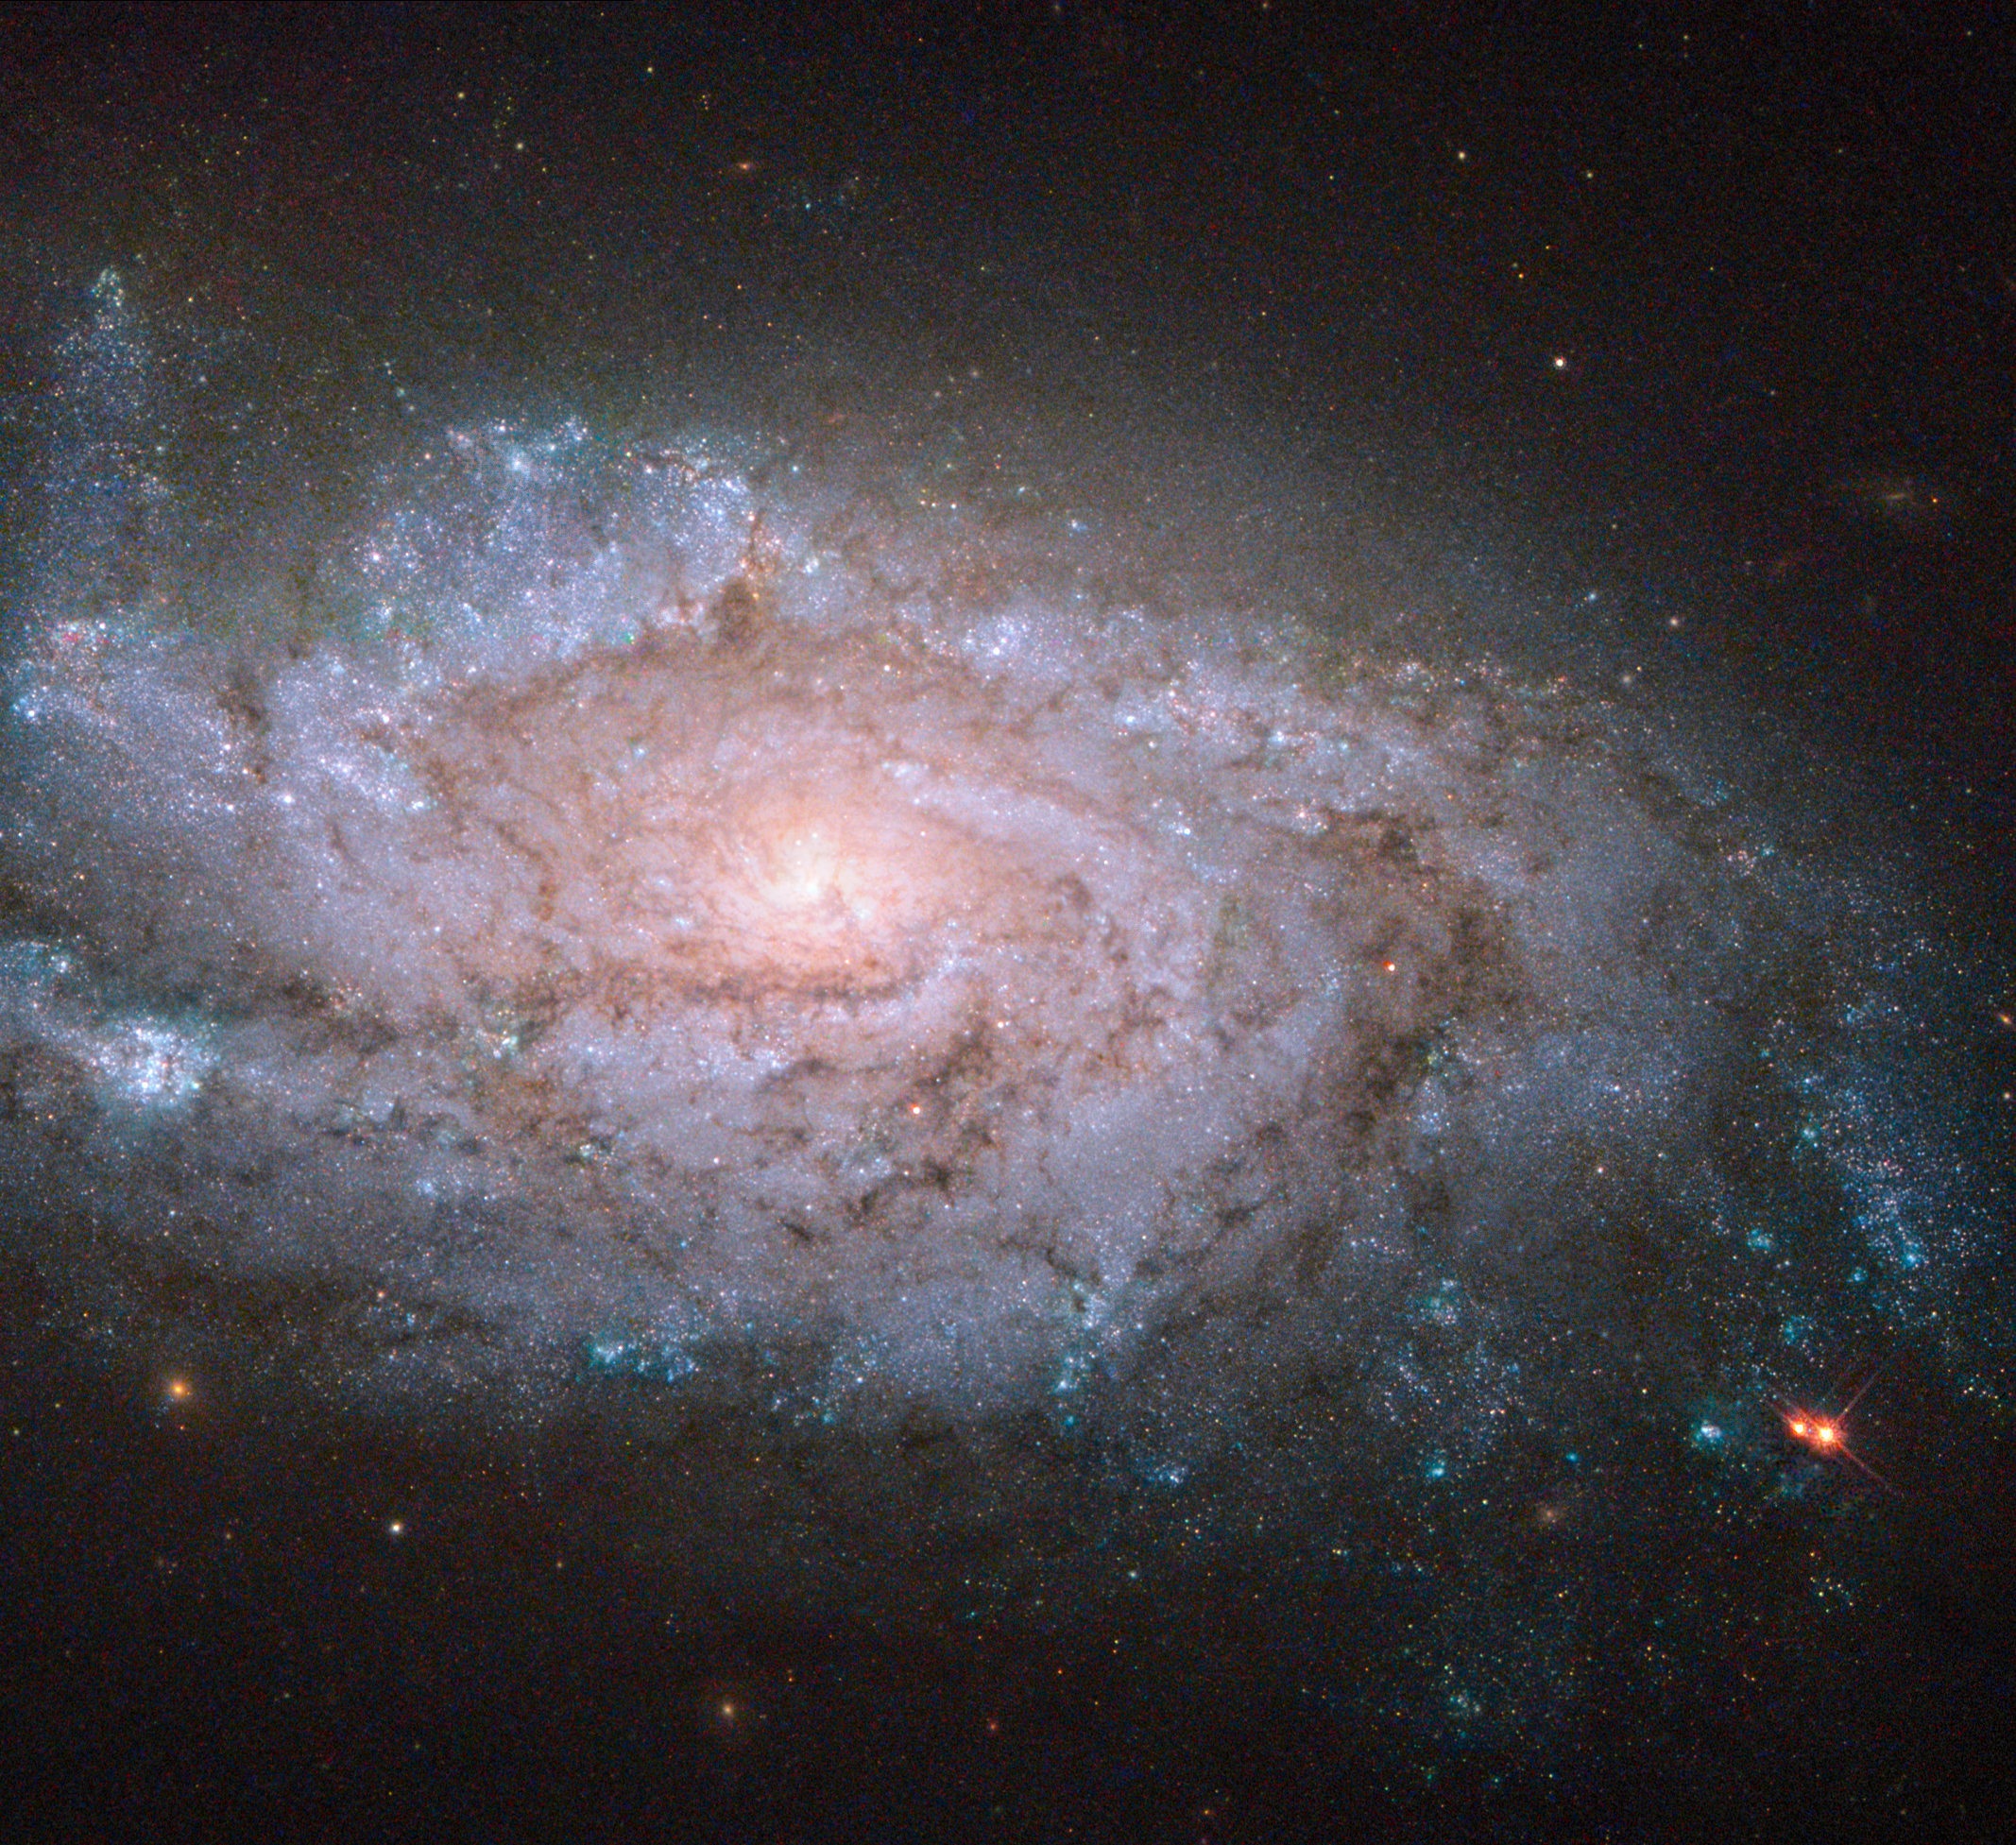

A spiral home to exploding stars

In this new Hubble image, we can see an almost face-on view of the galaxy NGC 1084. At first glance, this galaxy is pretty unoriginal. Like the majority of galaxies that we observe it is a spiral galaxy, and, as with about half of all spirals, it has no bar running through its loosely wound arms. However, although it may seem unremarkable on paper, NGC 1084 is actually a near-perfect example of this type of galaxy — and Hubble has a near-perfect view of it.

NGC 1084 has hosted several violent events known as supernovae — explosions that occur when massive stars, many times more massive than the Sun, approach their twilight years. As the fusion processes in their cores run out of fuel and come to an end, these stellar giants collapse, blowing off their outer layers in a violent explosion. Supernovae can often briefly outshine an entire galaxy, before then fading away over several weeks or months. Although directly observing one of these explosions is hard to do, in galaxies like NGC 1084 astronomers can find and study the remnants left behind.

Astronomers have noted five supernova explosions within NGC 1084 over the past half century. These remnants are named after the year in which they took place — 1963P, 1996an, 1998dl, 2009H, and 2012ec.

The most recent explosion, 2012ec, was detected at the end of NGC 1084’s top right arm in August 2012. It is not visible here as these images were taken in 2001, some eleven years before this supernova exploded. Astronomers at Queen's University Belfast have managed to use these "before" images to directly identify the star that exploded. It appears to be a red supergiant some 10 to 20 times more massive than the Sun, and quite similar to the well-known star Betelguese in Orion.

A version of this image was entered into the Hubble's Hidden Treasures image processing competition by Flickr user Brian Campbell (Sinickel).

Credit: NASA, ESA, and S. Smartt (Queen's University Belfast) Acknowledgement: Brian Campbell